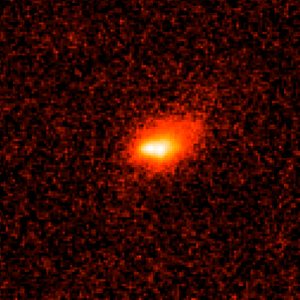

Gamma-ray burst host galaxy GRB030329

This image shows a long duration gamma burst, as taken by the Hubble Space Telescope.

Credit: NASA, ESA, A. Fruchter (STScI), and the GOSH Collaboration